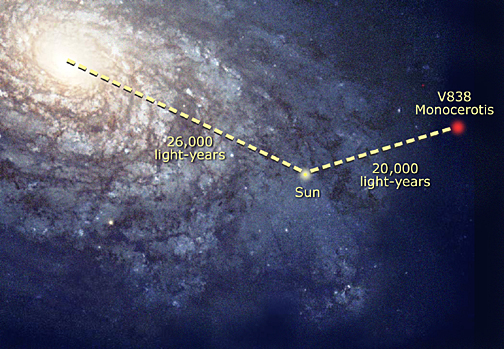

V838 Mon in the Milky Way galaxy

This diagram shows the location of V838 Mon in the Milky Way Galaxy.

Credit: NASA/ESA, A. Feild (STScI) and the Hubble Heritage Team (AURA/STScI).